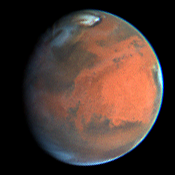

Rapid Weather Change Observed on Mars

NASA/ESA Hubble Space Telescope images of Mars obtained on July 9, 1997.

Credit: Steve Lee (Univ. Colorado), Phil James (Univ. Toledo), and Todd Clancy (Space Science Inst.)